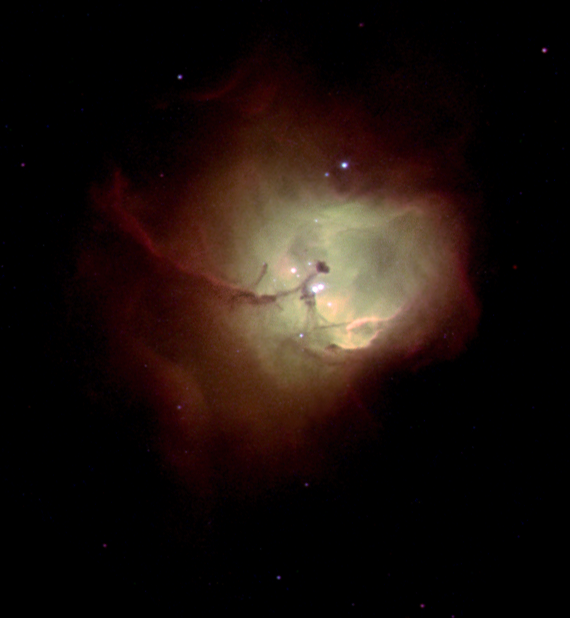

Nebula N 81

NASA/ESA Hubble Space Telescope has peered deep into a neighboring galaxy to reveal details of the formation of new stars. Hubble's target was a newborn star cluster within the Small Magellanic Cloud, a small galaxy that is a satellite of our own Milky Way. The new images show young, brilliant stars cradled within a nebula, or glowing cloud of gas, cataloged as N 81.

Credit: NASA/ESA and The Hubble Heritage Team (STScI/AURA)